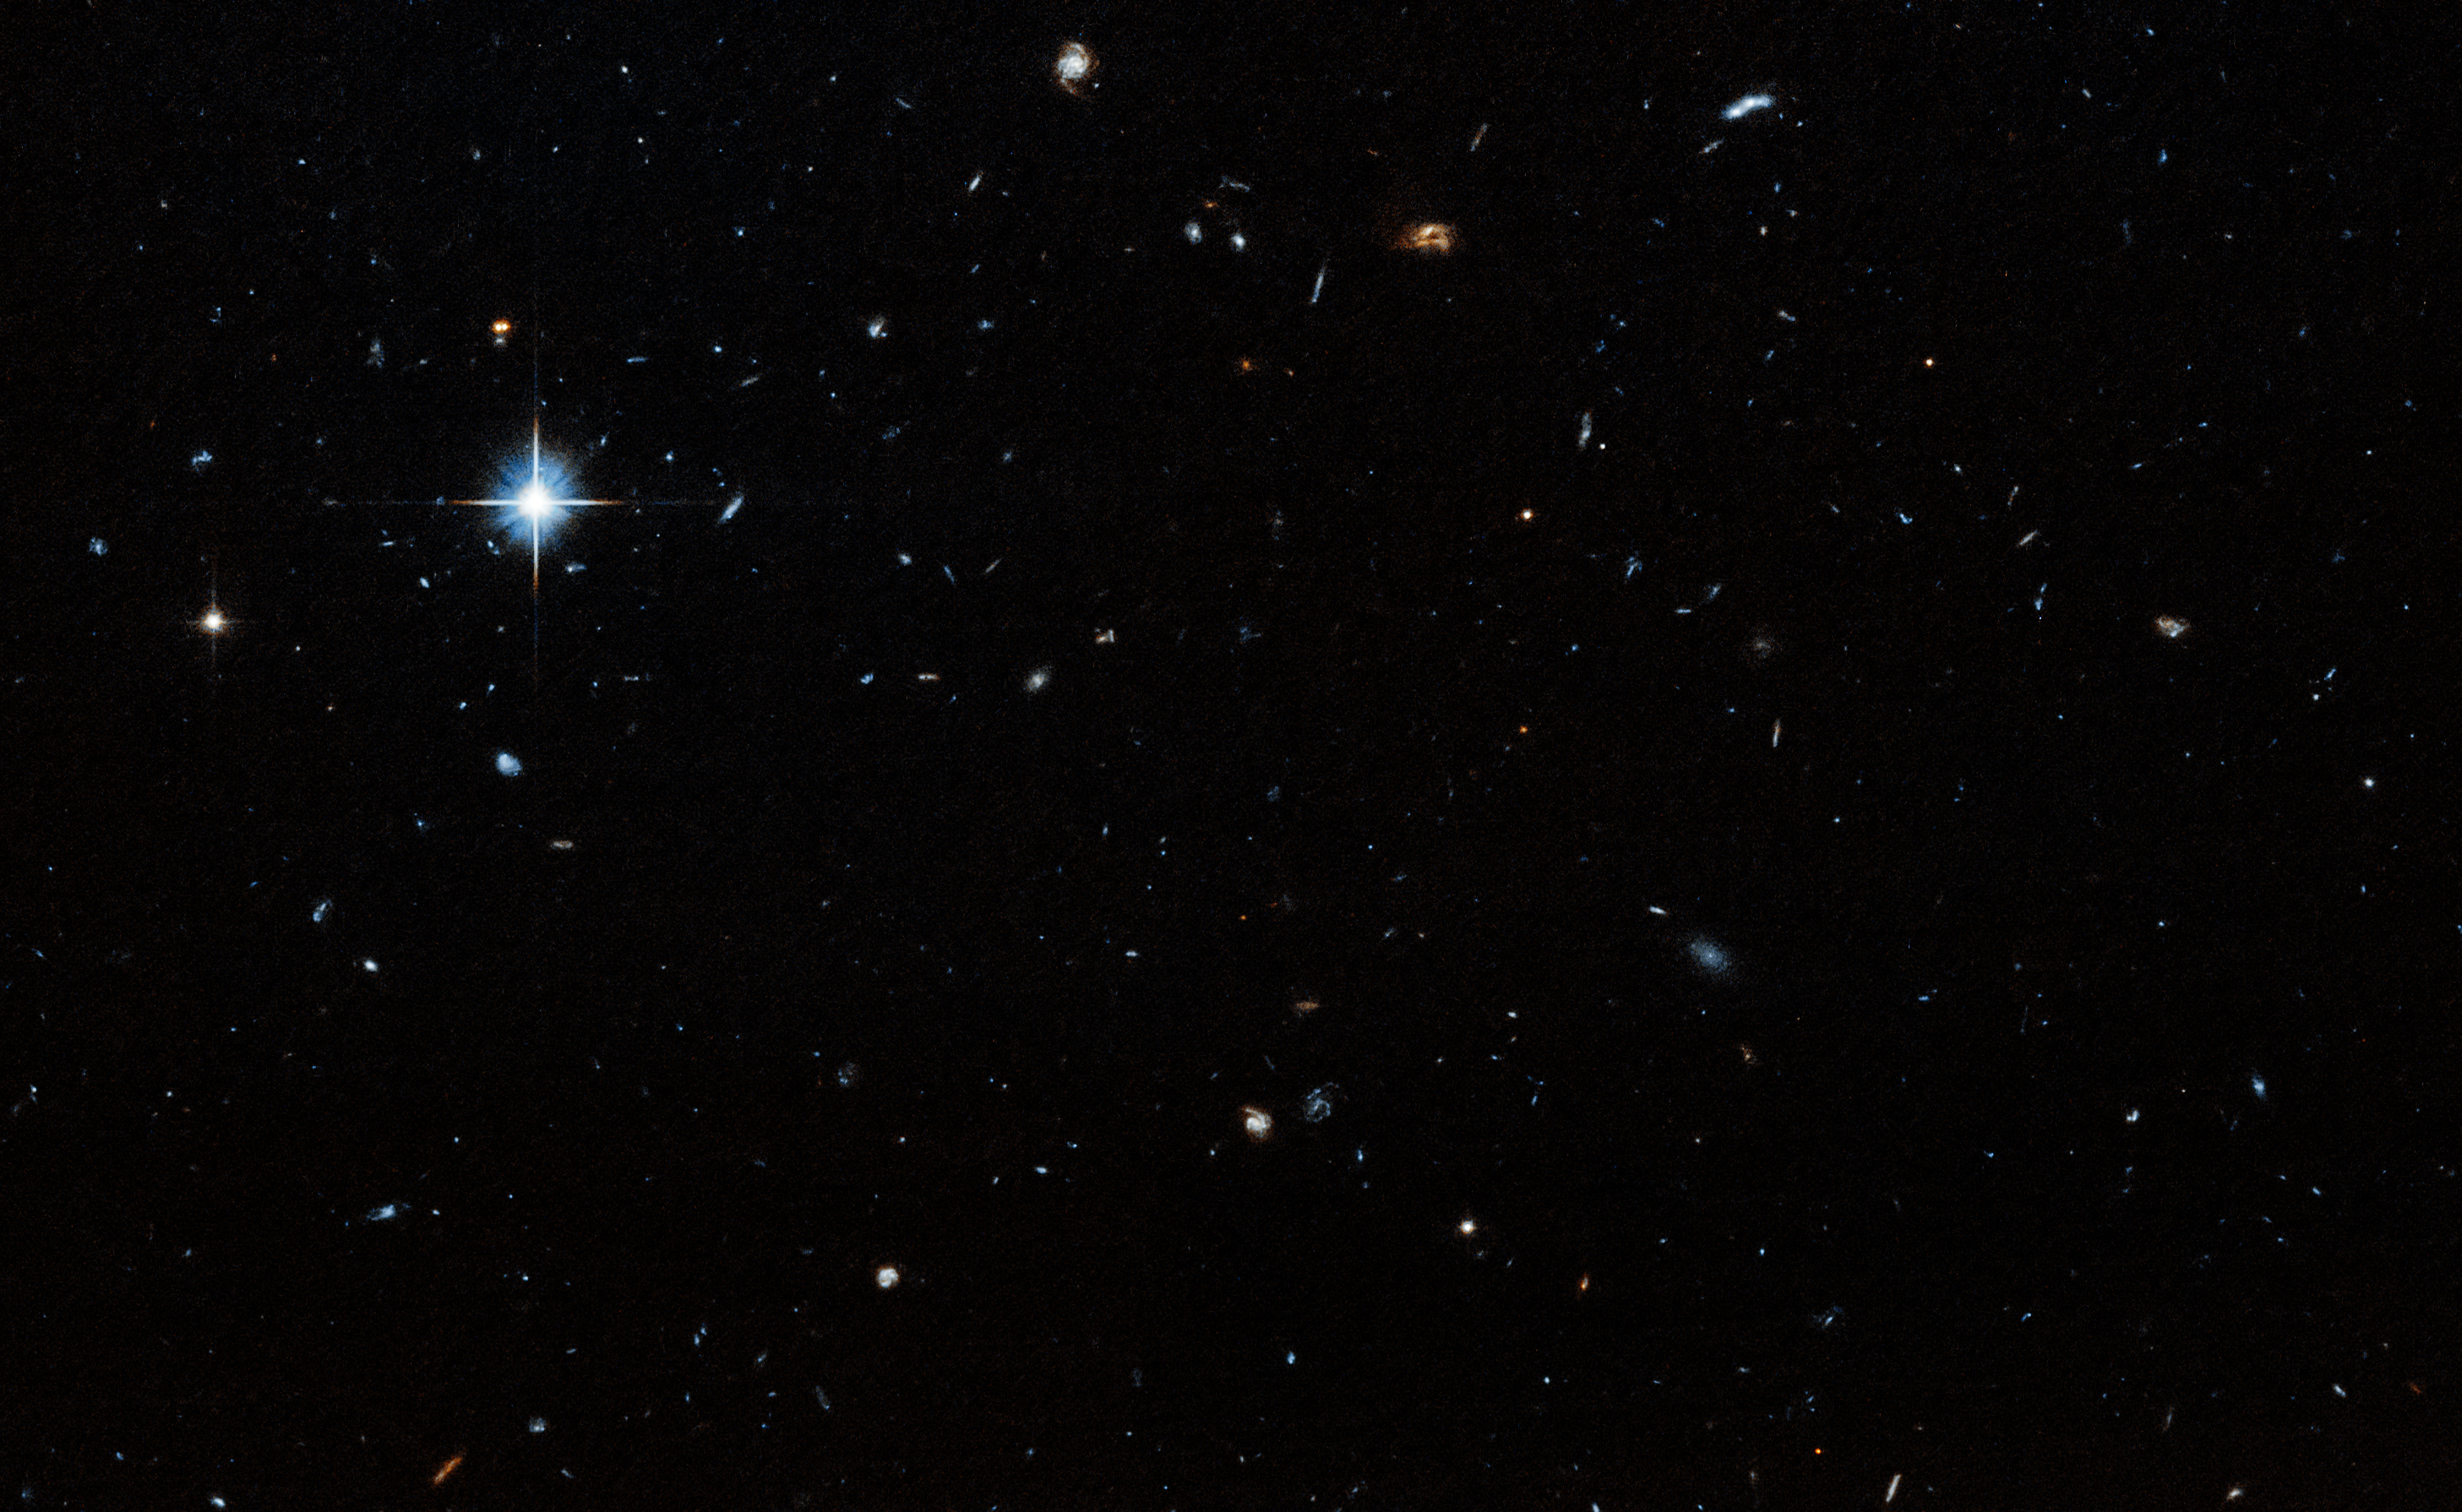

Field surrounding Cloud-9

A team using the NASA/ESA Hubble Space Telescope has uncovered a new type of astronomical object —a starless, gas-rich, dark-matter cloud that is considered a “relic” or remnant of early galaxy formation. Nicknamed “Cloud-9,” this is the first confirmed detection of such an object in the Universe

This image shows the blank field of the surrounding region of Cloud-9. The image identifying its location can be found here.

Credit: NASA, ESA. G. Anand (STScI), and A. Benitez-Llambay (Univ. of Milan-Bicocca); Image processing: J. DePasquale (STScI)